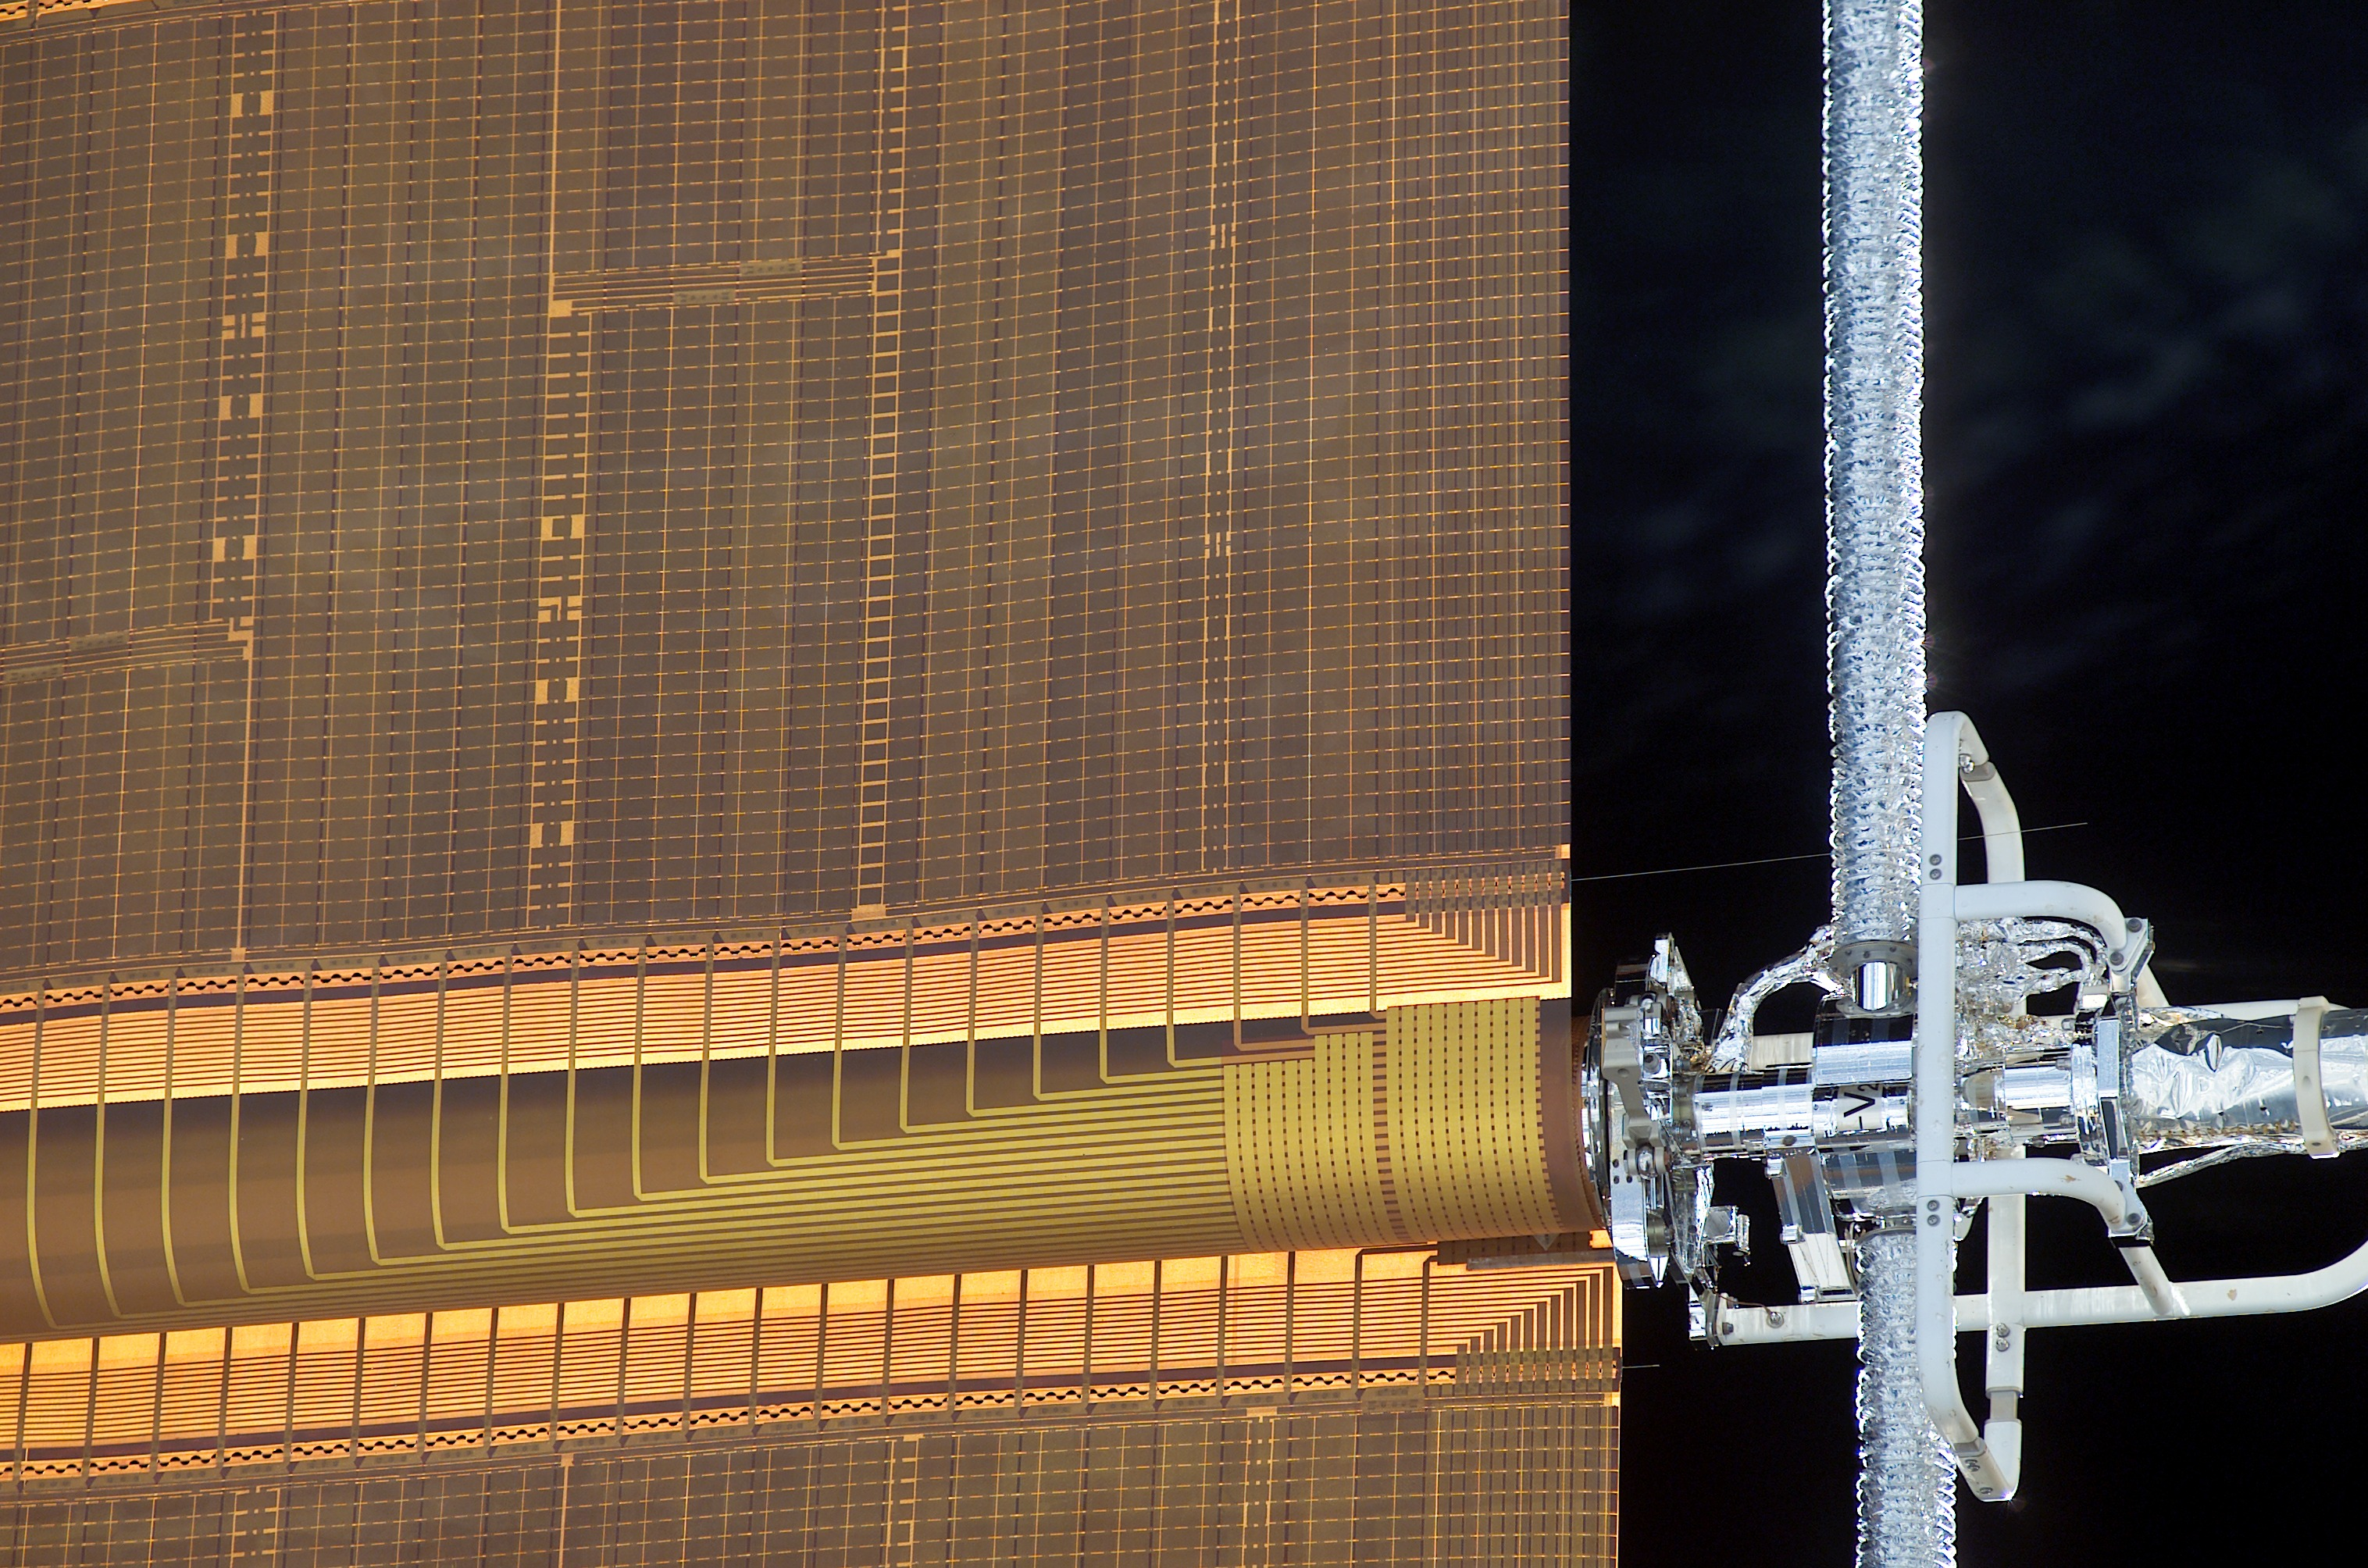

A pin protruding from one of the solar arrays

A snapshot with the digital camera onboard the Space Shuttle. The high resolution of the image enables the ESA team to examine the situation of the hinge pins very accurately. The pin protruding the most (about 0.5 metre) from the array is clearly seen in this photo.

[3 March 2002 11:56 UT]

Credit: NASA/ESA